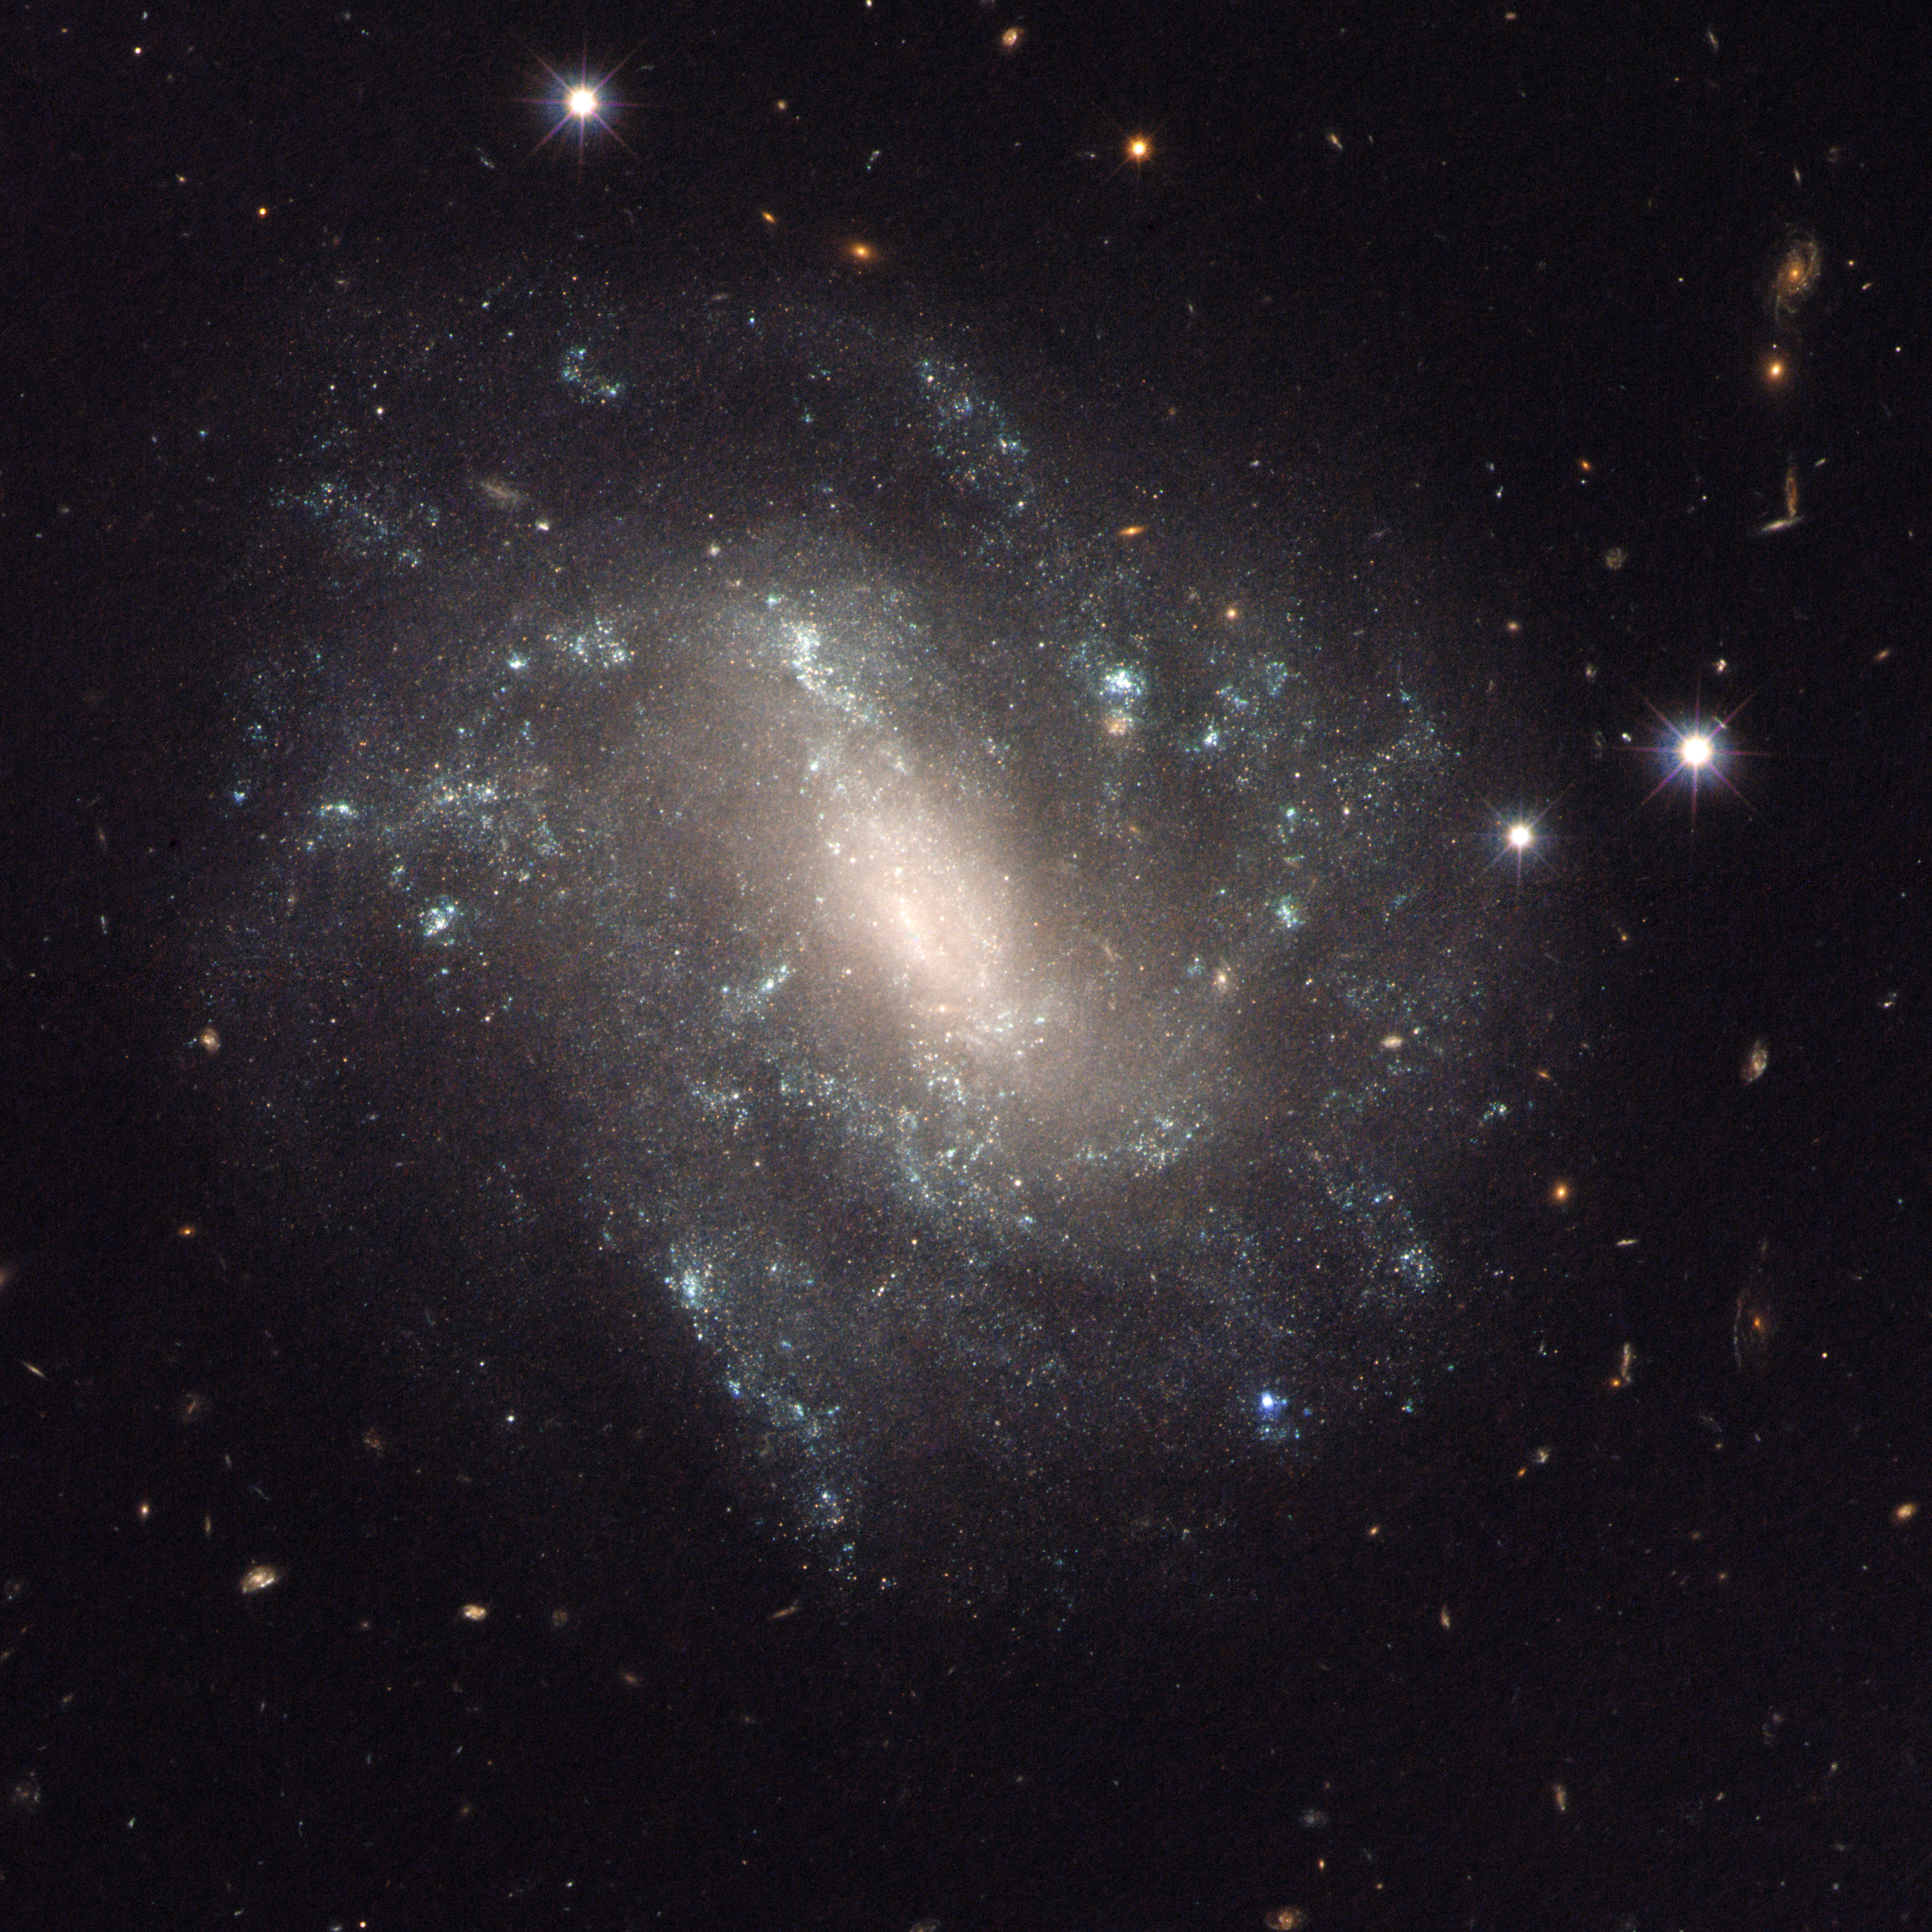

UGC 9391

Cepheid variable stars in this spiral galaxy, known as UGC 9391, and a Type Ia supernova (not visible in this image) were used by a team of astronomers to calculate the expansion rate of the modern Universe.

Credit: NASA, ESA, and L. Frattare (STScI)